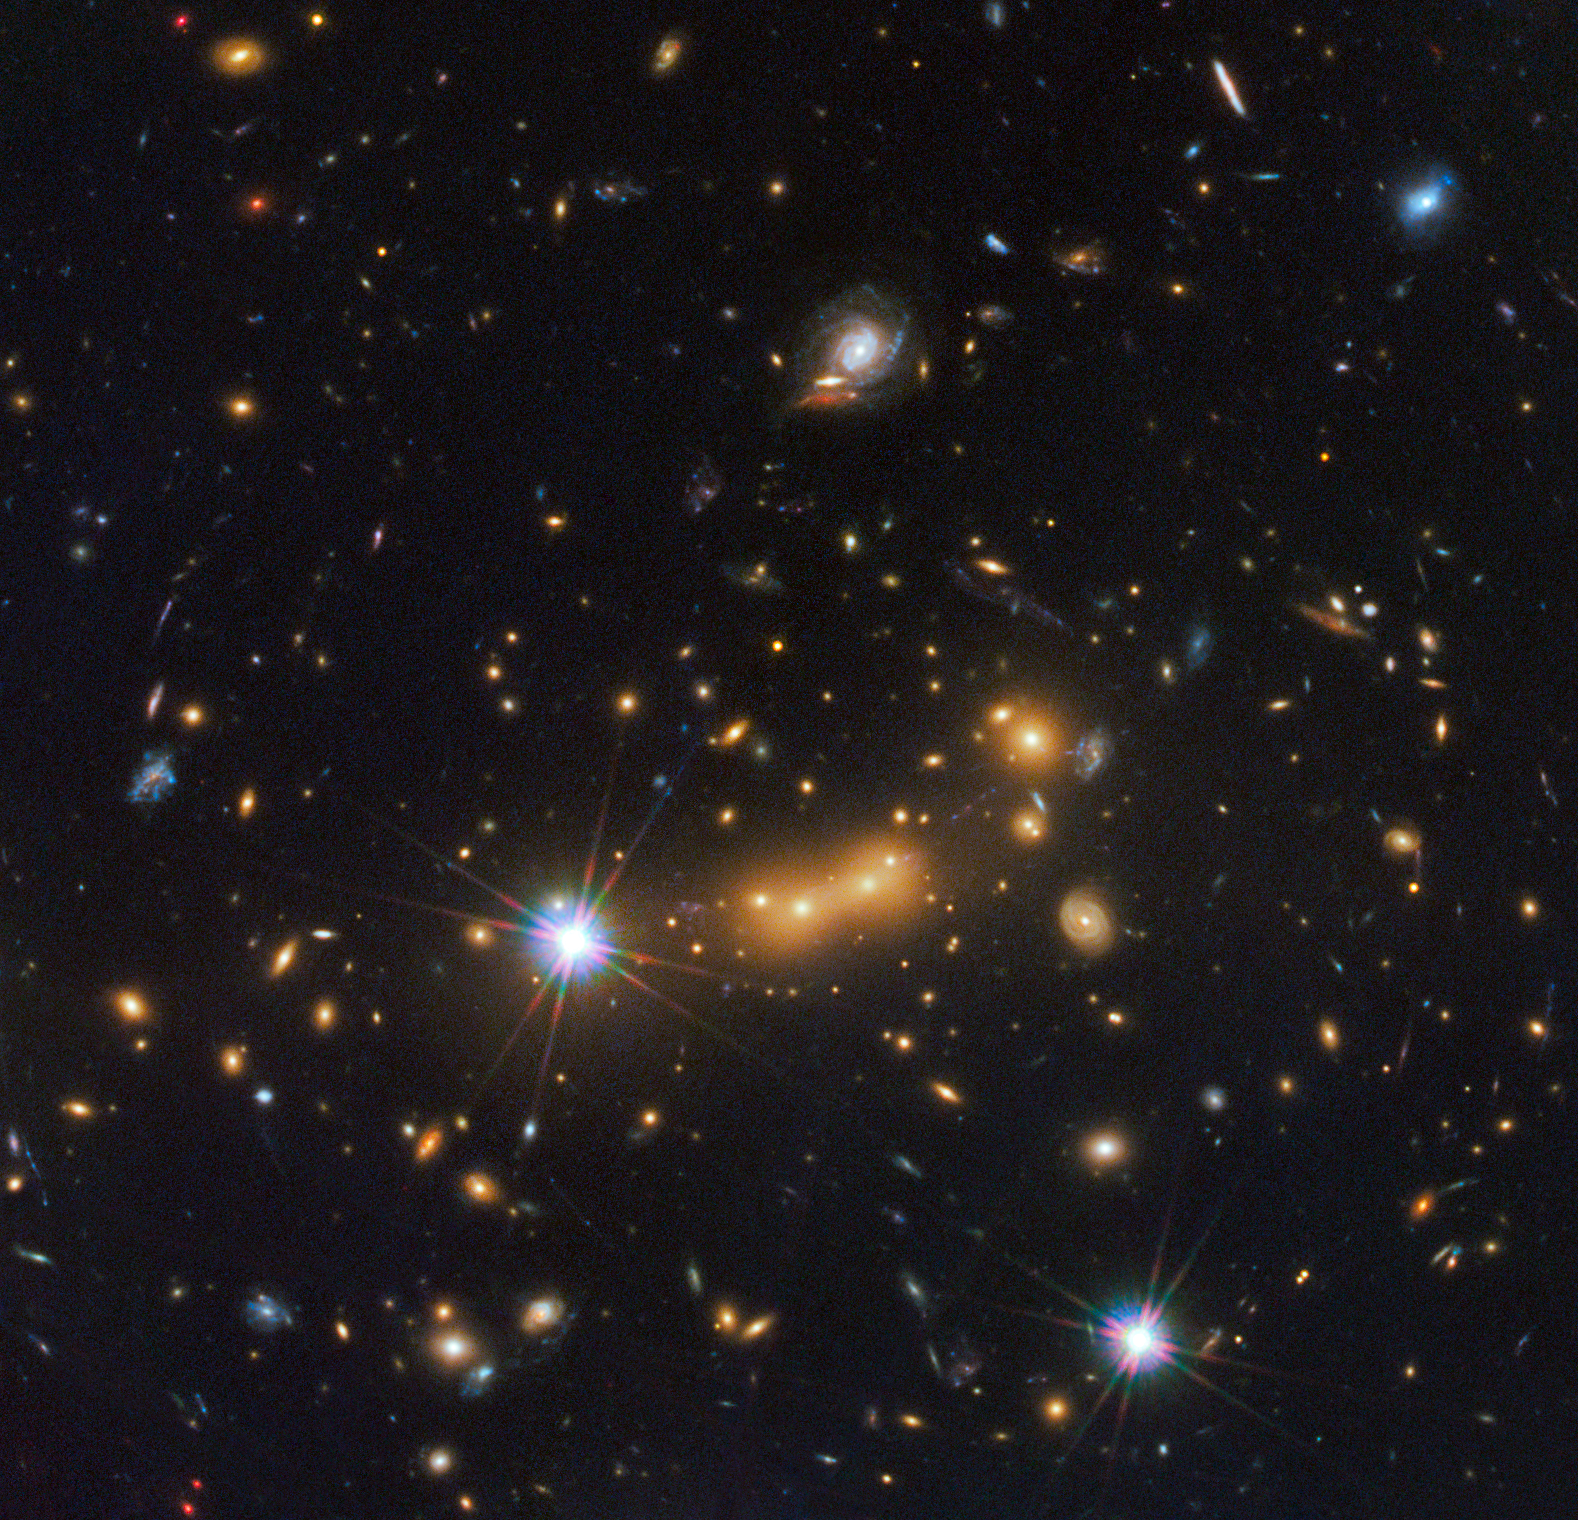

Galaxy cluster MACS J0647.7+7015

This view from the Hubble Space Telescope shows the massive galaxy cluster MACS J0647.7+7015. Astronomers used the powerful gravity from the cluster to magnify the light from a distant galaxy, using an effect called gravitational lensing.

The bright yellow galaxies near the center of the image are cluster members; due to the gravitational lensing technique, astronomers observed three magnified images of a far more distant galaxy called MACS0647-JD with the Hubble telescope. These are visible as small red dots in this image.

This is the latest discovery from a large program, called the Cluster Lensing And Supernova survey with Hubble (CLASH), that uses natural zoom lenses to reveal distant galaxies in the early Universe.

This image is a composite taken with Hubble’s Wide Field Camera 3 and the Advanced Camera for Surveys. The observations were taken 5 October and 29 November 2011.

Credit: NASA, ESA, and M. Postman and D. Coe (Space Telescope Science Institute), and the CLASH team